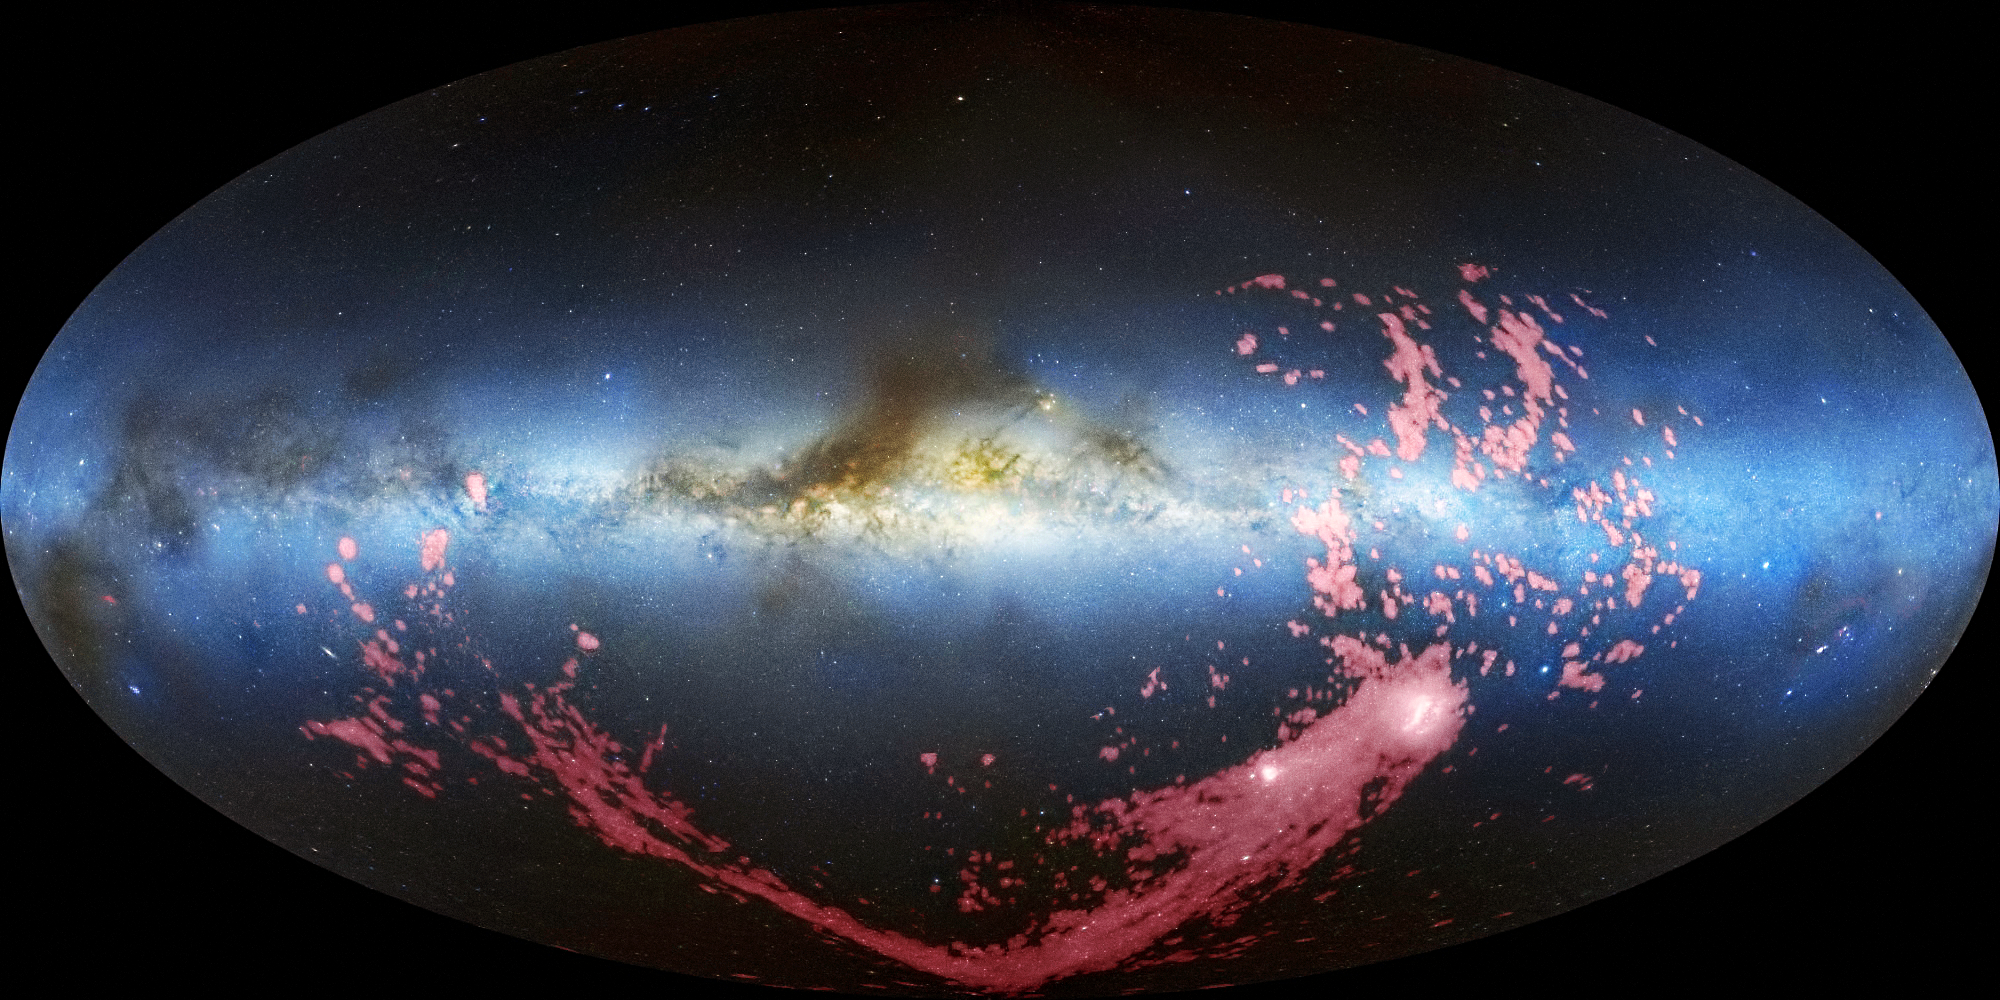

All-sky view of the Magellanic Stream (radio/visible-light)

This image shows a long ribbon of gas called the Magellanic Stream, which stretches nearly halfway around the Milky Way.

In this combined radio and visible-light image, the gaseous stream is shown in pink. The radio observations are taken from the Leiden/Argentine/Bonn (LAB) Survey. The Milky Way is the light blue band in the centre of the image. The brown clumps are interstellar dust clouds in our galaxy. The Magellanic Clouds, satellite galaxies of the Milky Way, are the white regions at the bottom right.

Credit: David L. Nidever, et al., NRAO/AUI/NSF and Mellinger, Leiden/Argentine/Bonn Survey, Parkes Observatory, Westerbork Observatory, and Arecibo Observatory.